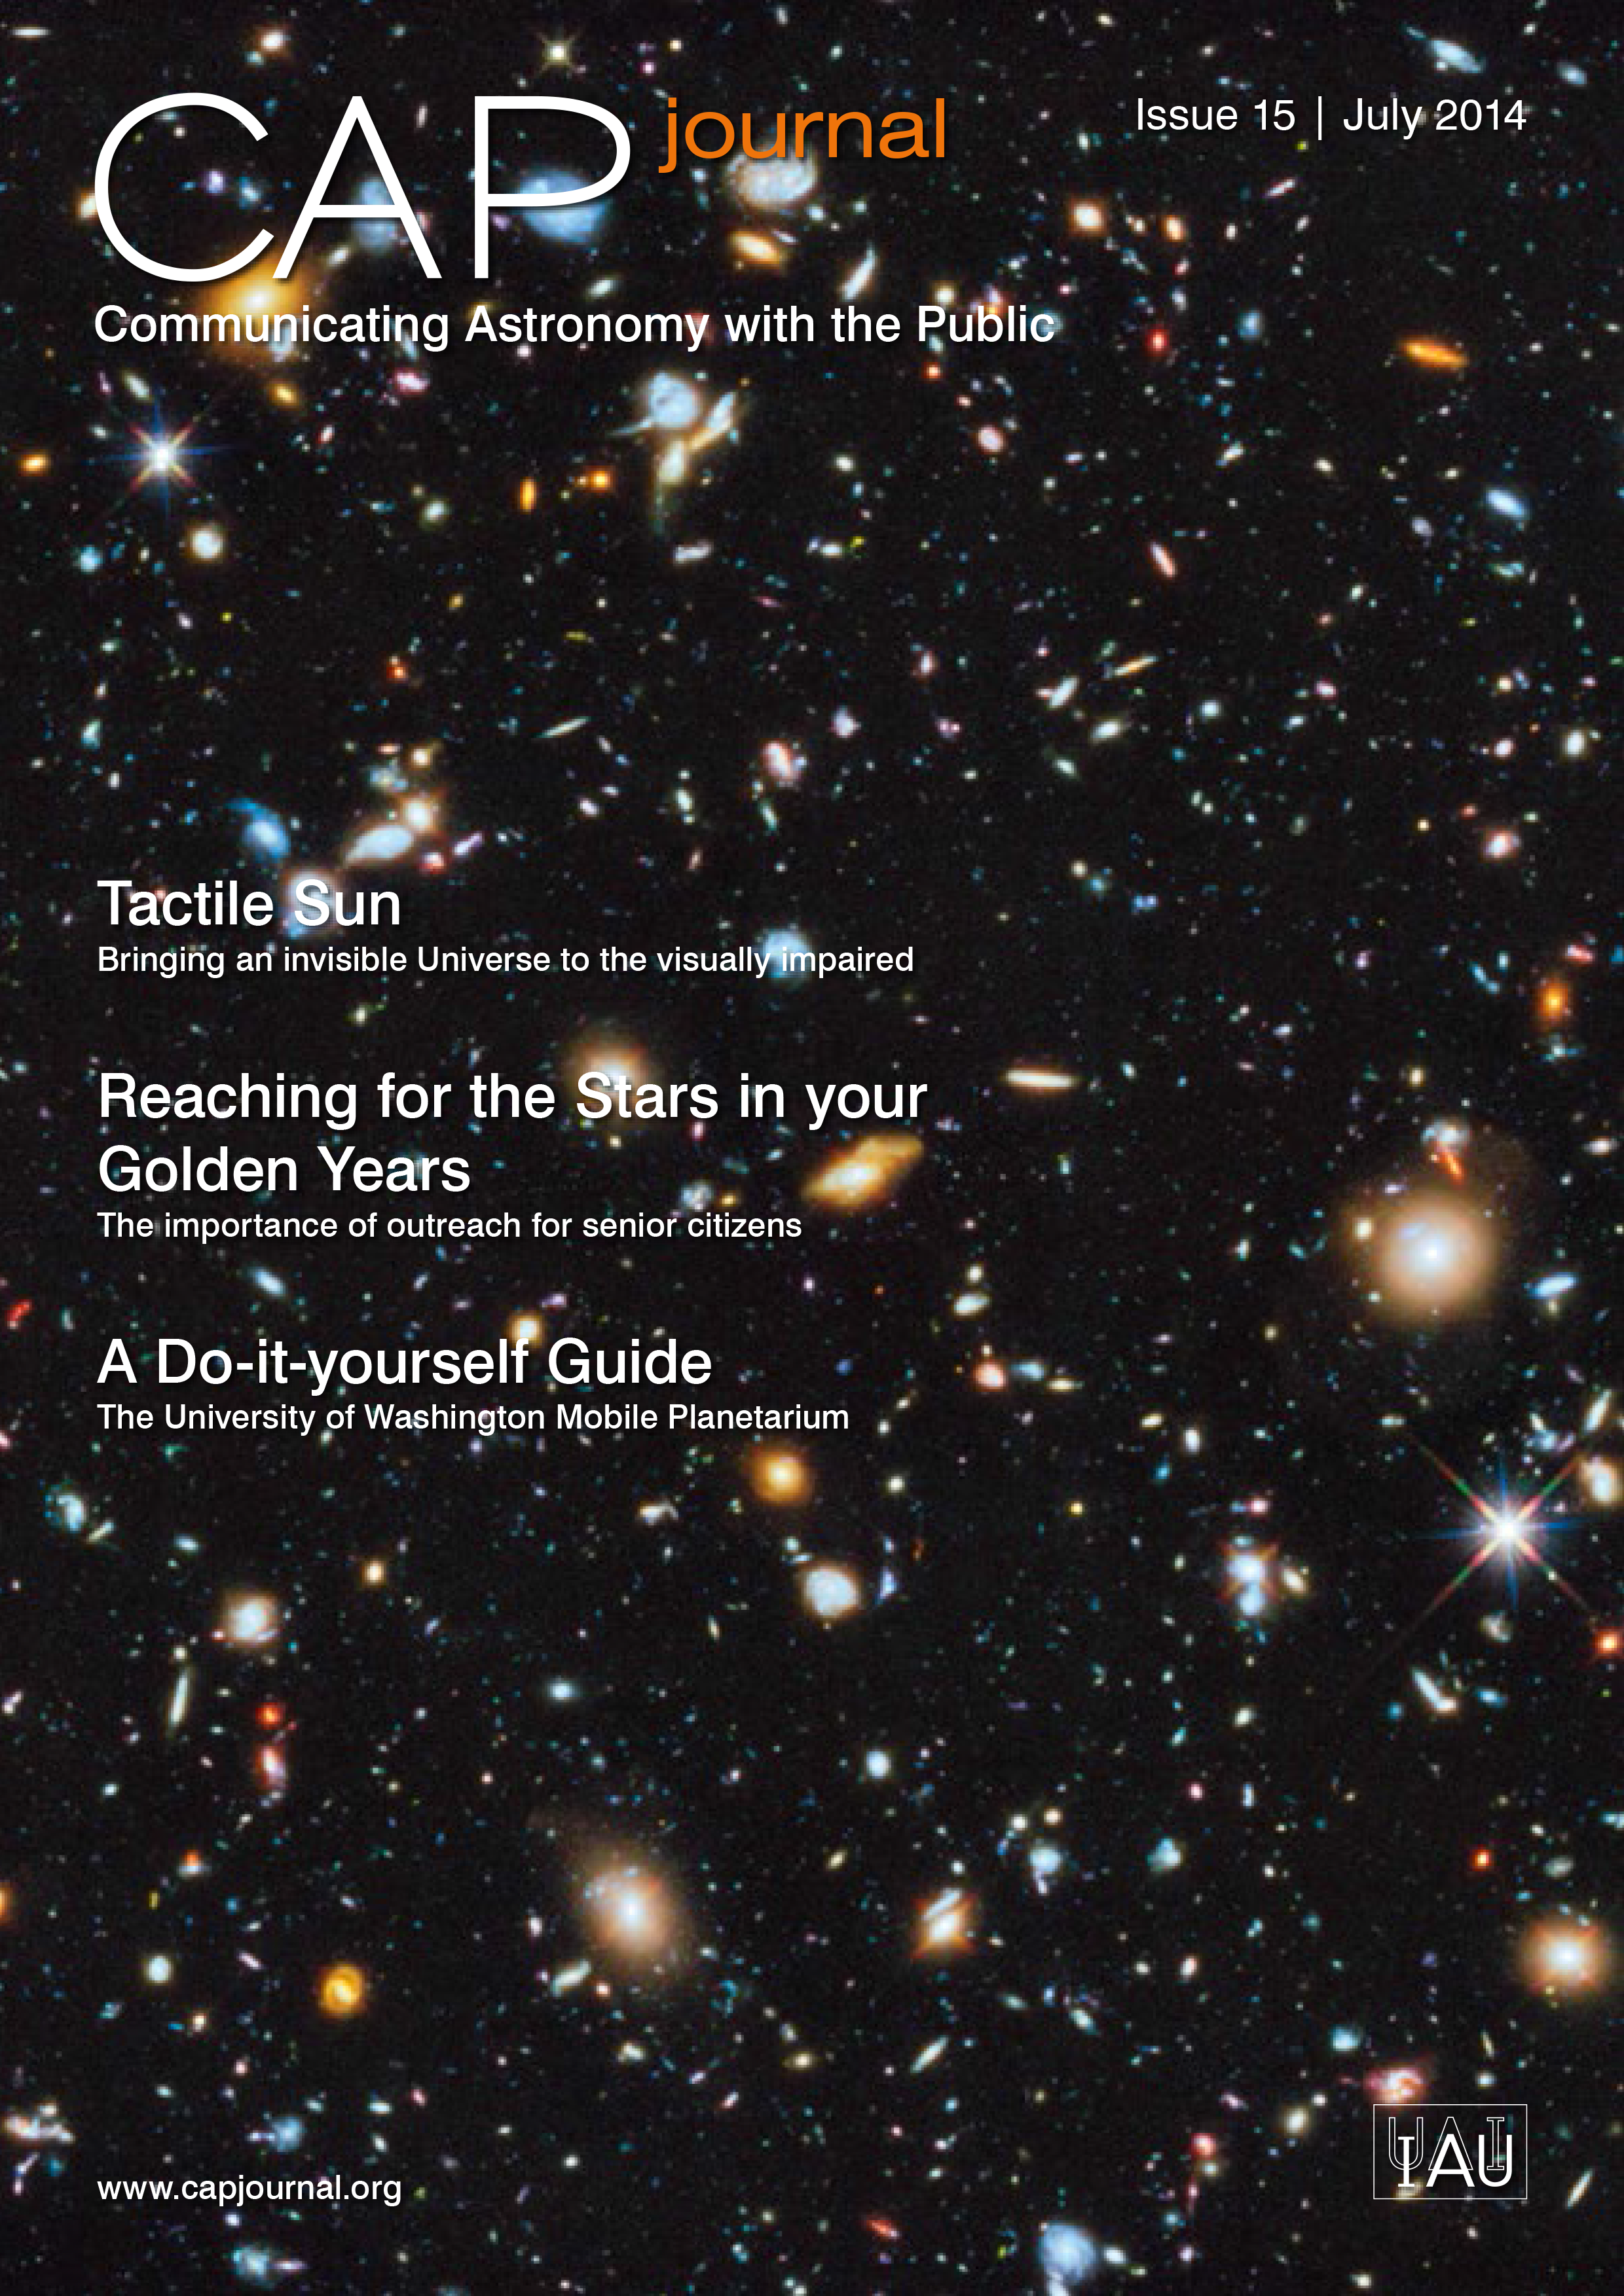

Cover of CAPjournal issue 15

The CAPjournal is a free peer-reviewed journal for astronomy communicators, online and in print. To subscribe to the print or online version please go here.

This issue in PDF format is available on: http://www.capjournal.org/issues/15/.

Credit: IAU/ESO